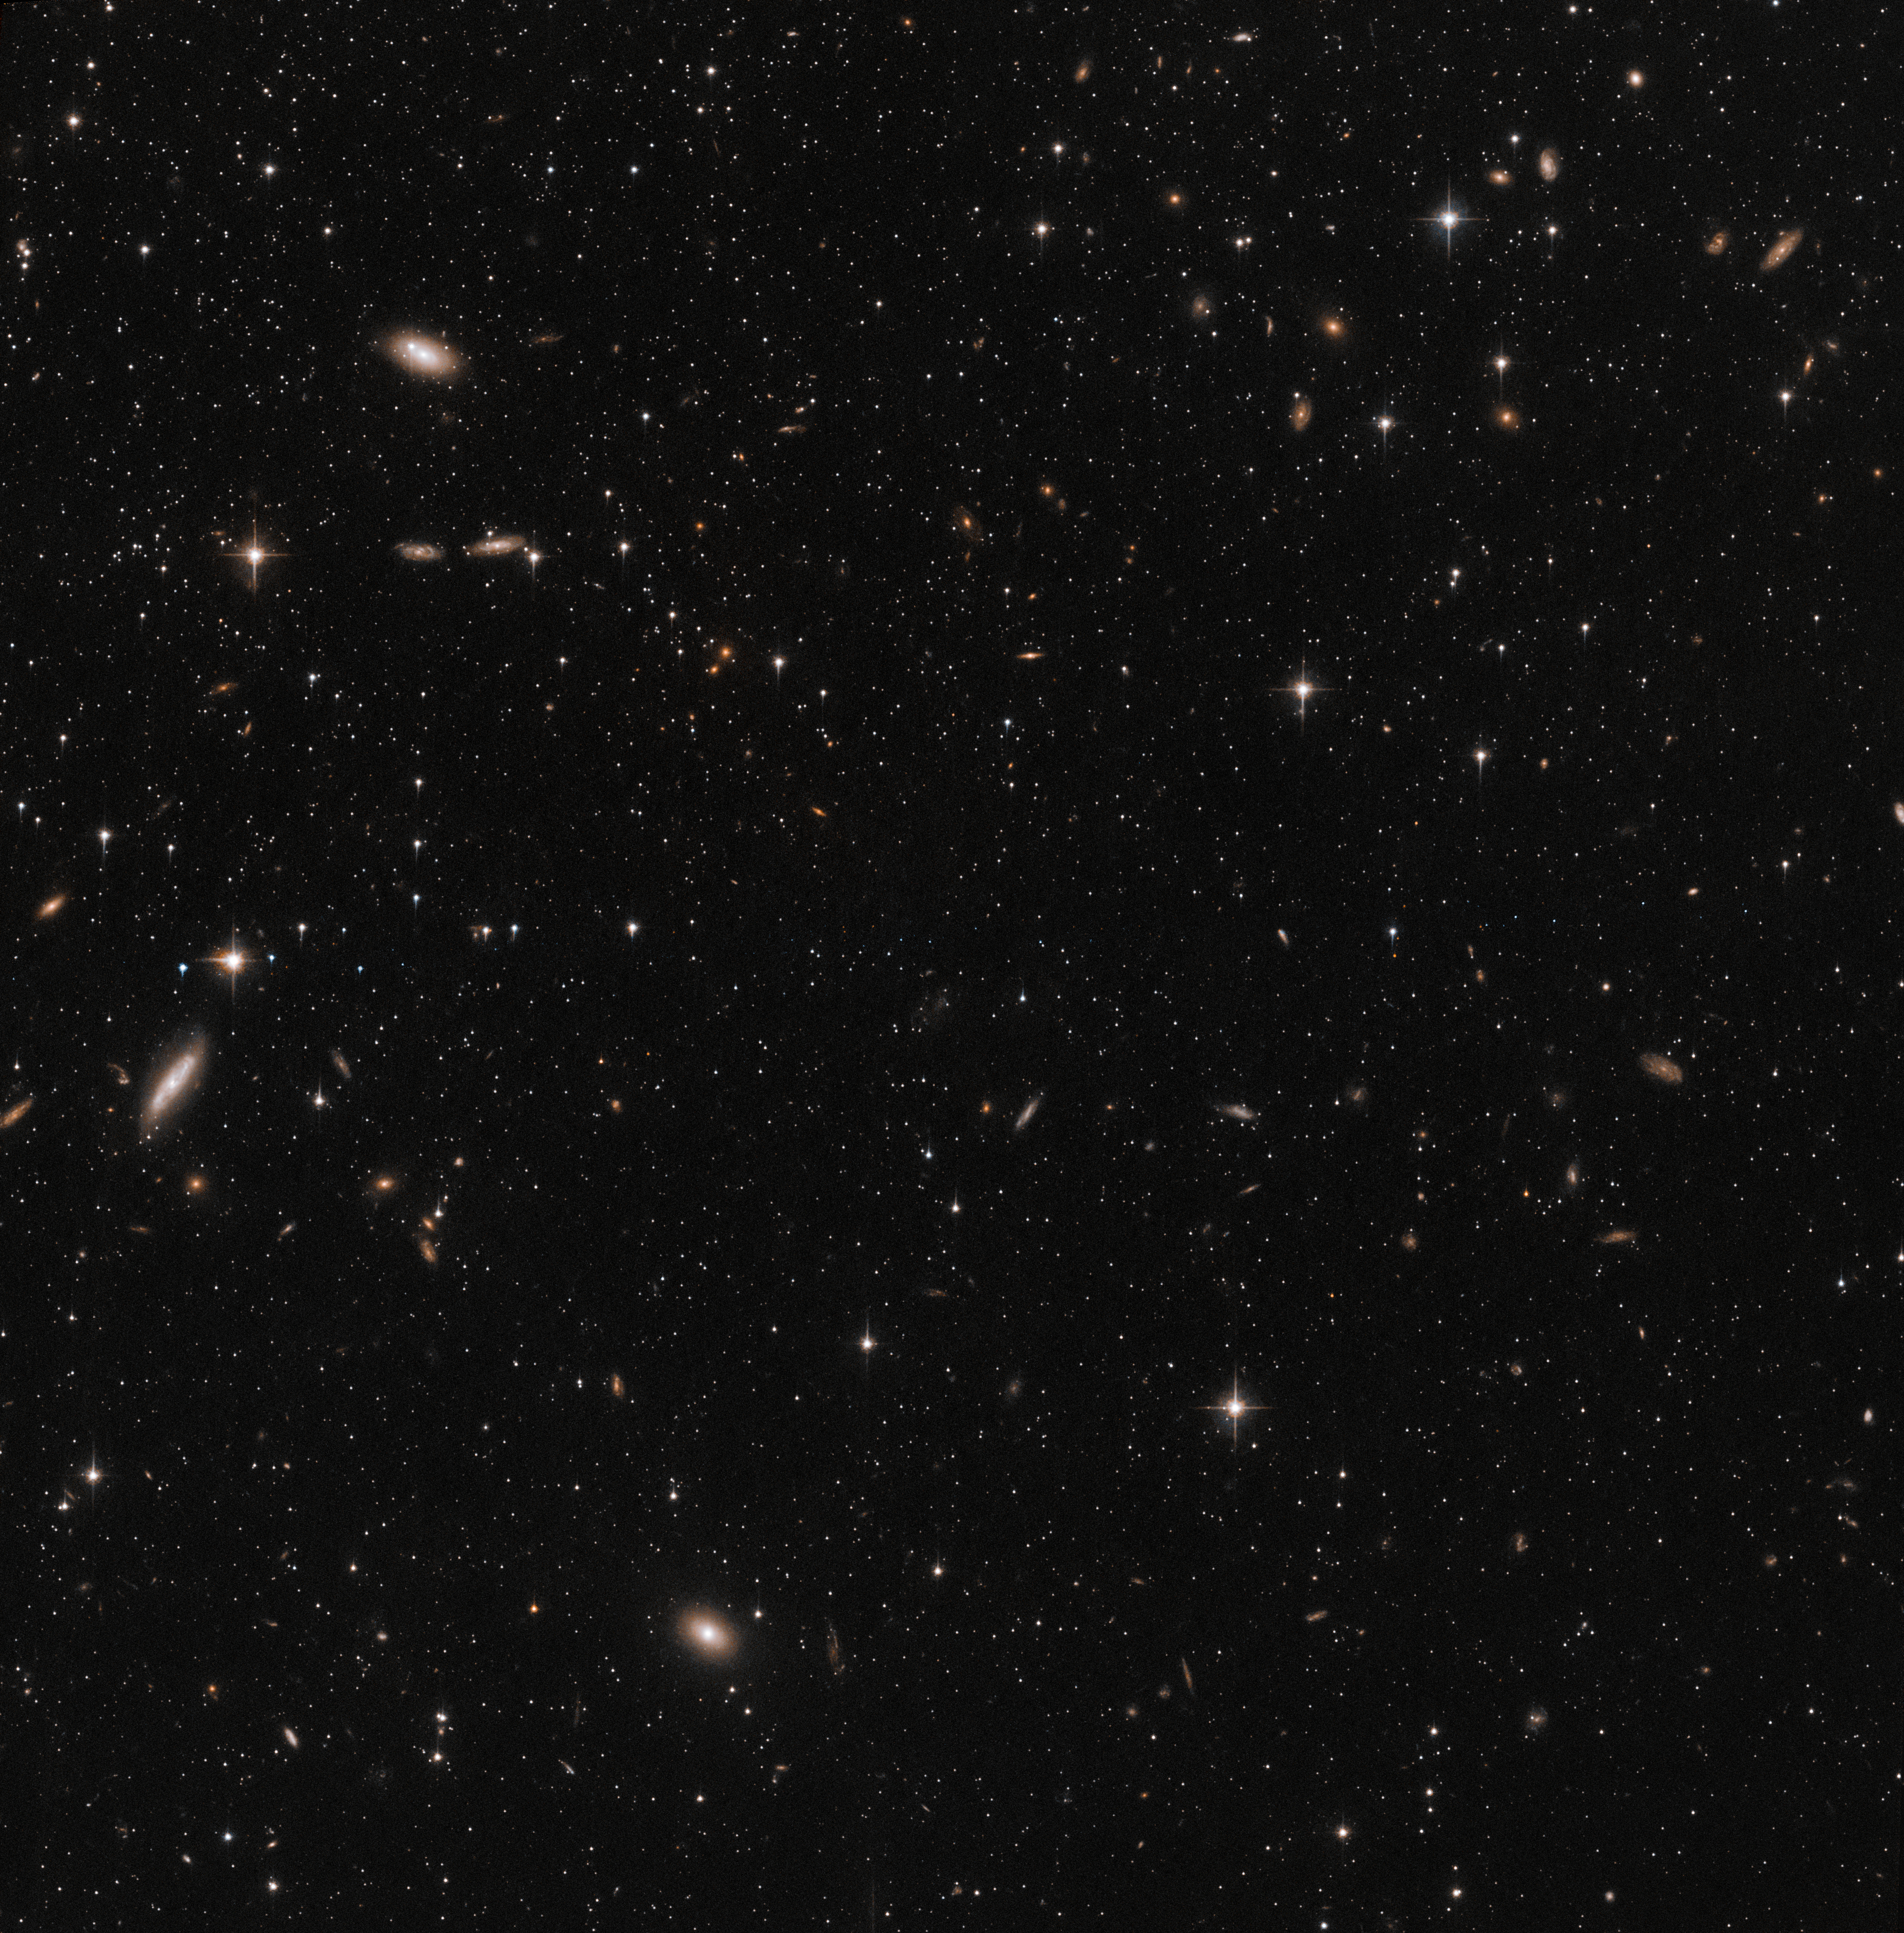

Hubble’s view of the Sculptor Dwarf Galaxy (pointing 2)

This image shows a small part of the Sculptor Dwarf Galaxy, a satellite galaxy of the Milky Way, situated only about 300 000 light-years away from Earth. This is one of two different pointings of the telescope that were used in a study combining data from the NASA/ESA Hubble Space Telescope and ESA’s Gaia satellite to measure the 3D motion of stars in this galaxy.

Credit: ESA/Hubble & NASA